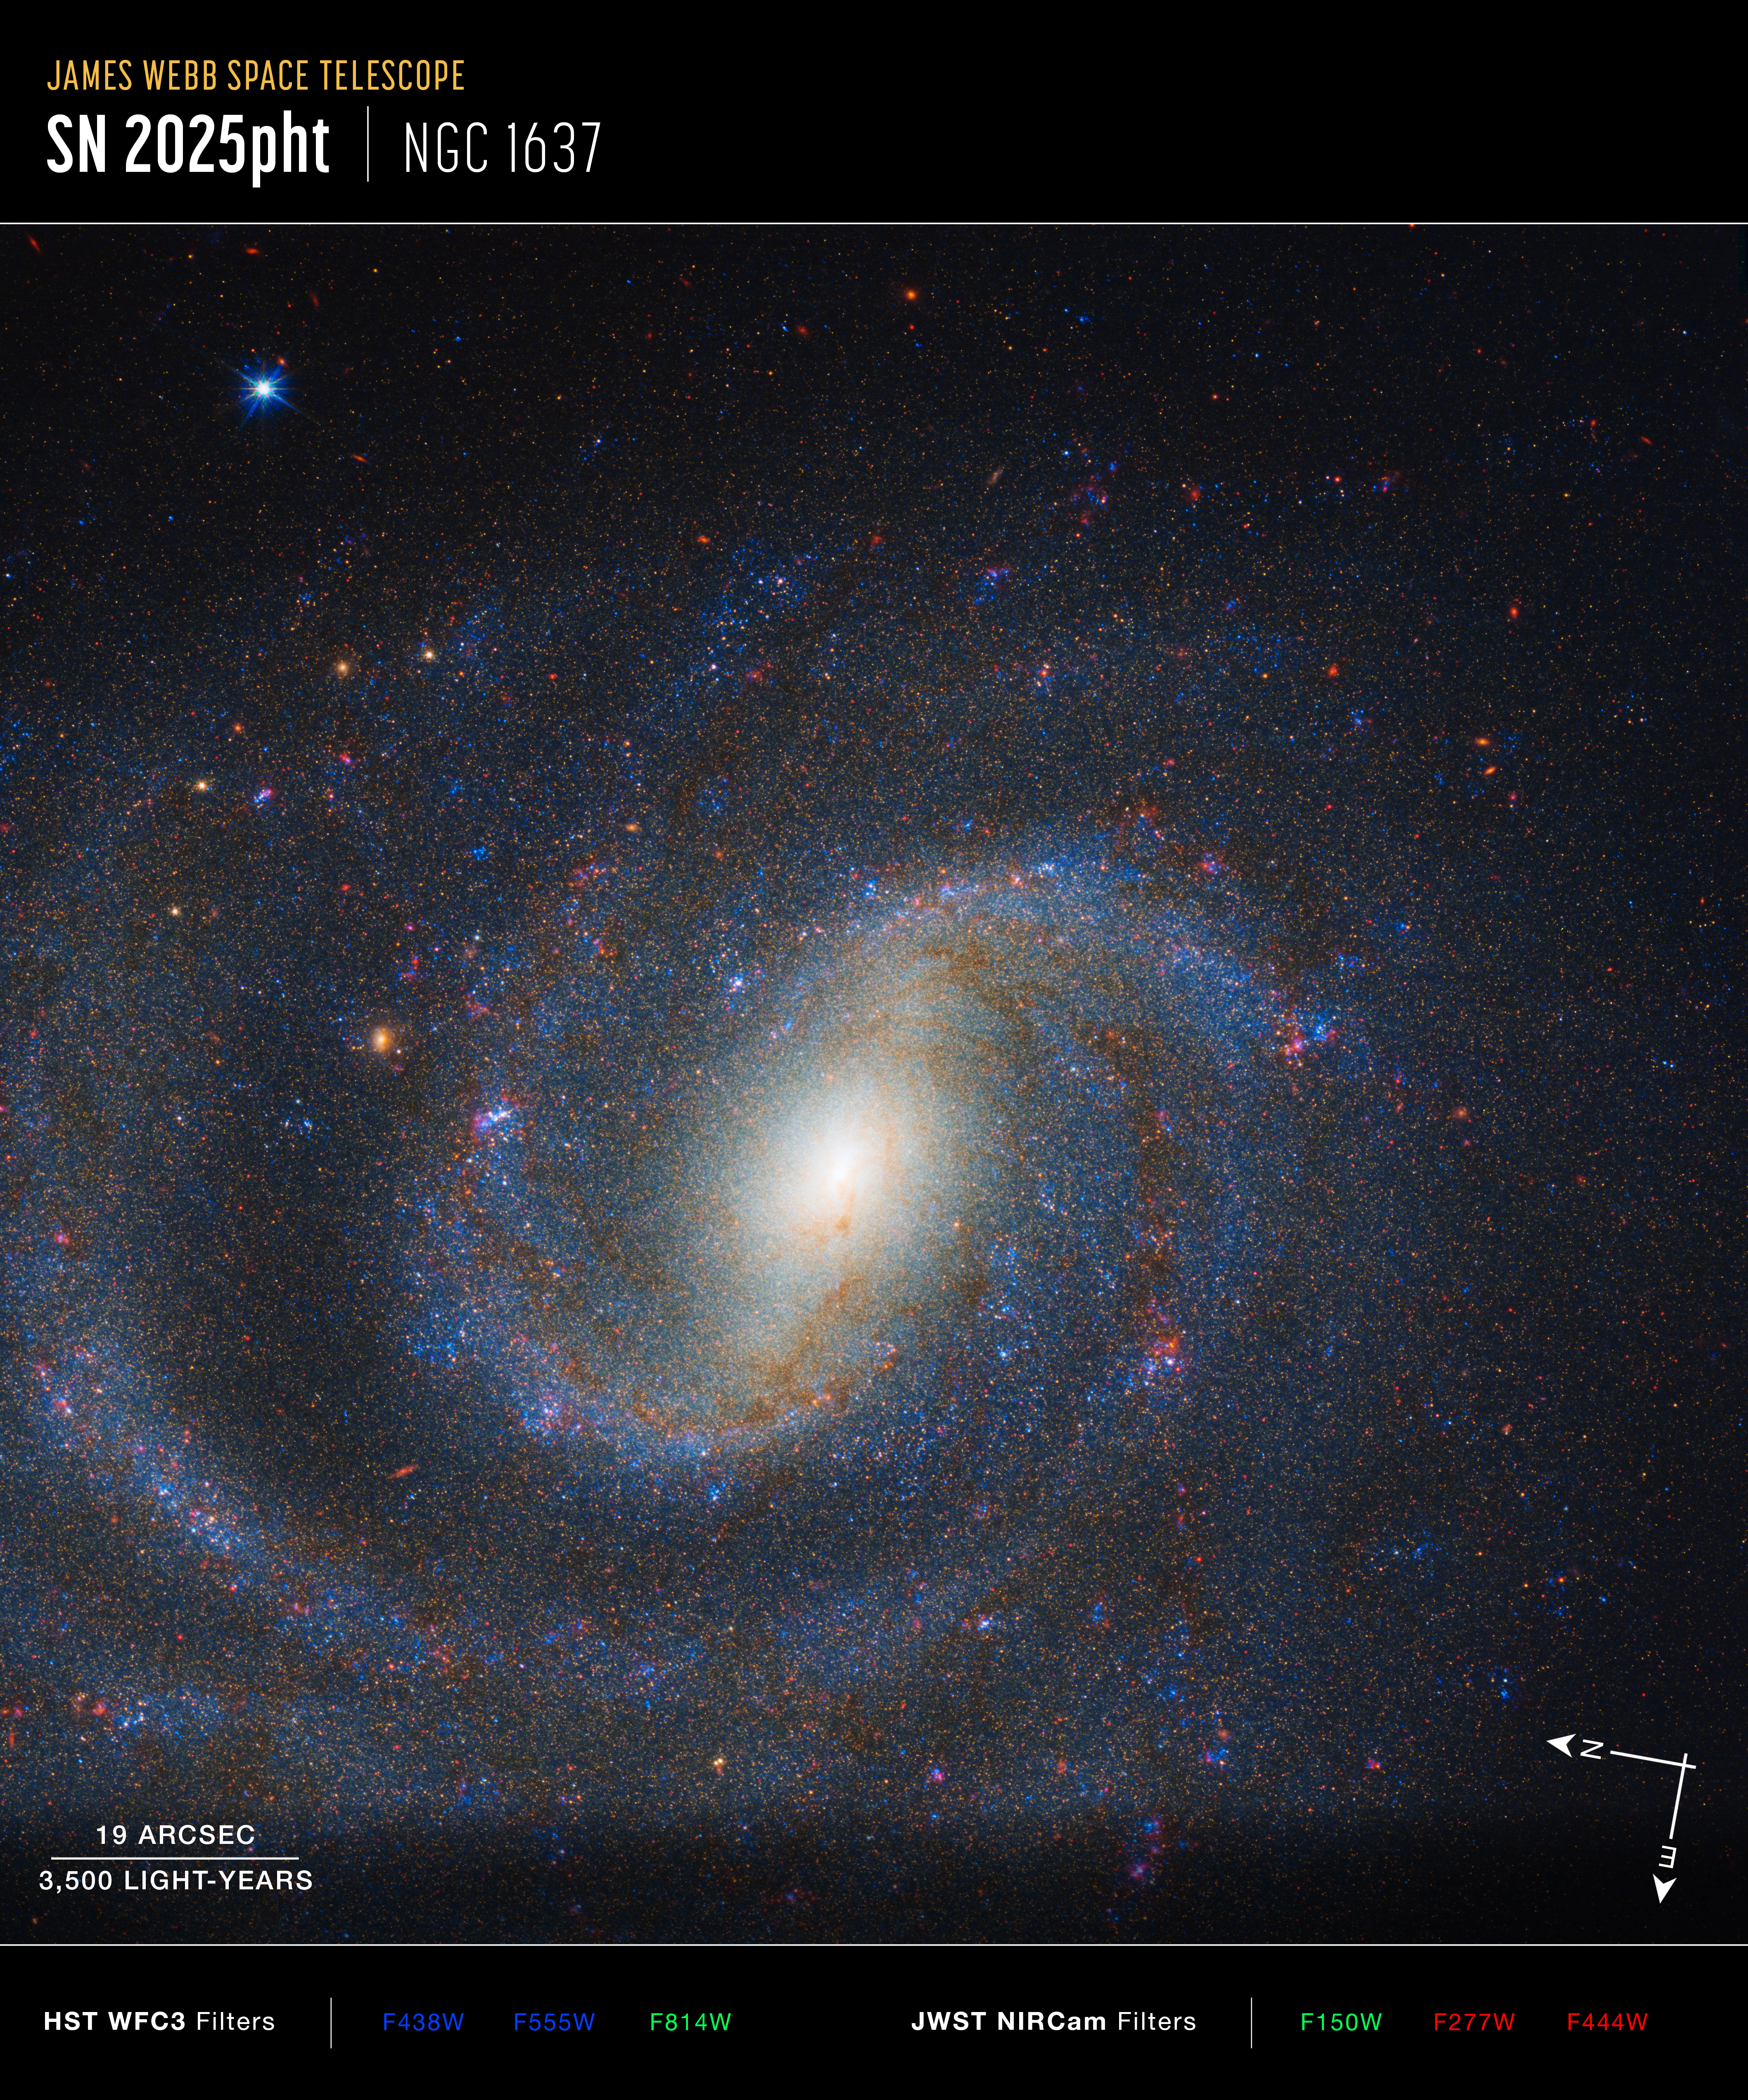

NGC 1637 (Hubble WFC3 and Webb NIRCam images, annotated)

Image of galaxy NGC 1637 captured by Hubble’s WFC3 and Webb’s NIRCam, with compass arrows, scale bar, and colour key for reference.

The north and east compass arrows show the orientation of the image on the sky. Note that the relationship between north and east on the sky (as seen from below) is flipped relative to direction arrows on a map of the ground (as seen from above).

The scale bar is labeled in light-years, which is the distance that light travels in one Earth-year. (It takes 3,500 years for light to travel a distance equal to the length of the bar.) One light-year is equal to about 5.88 trillion miles or 9.46 trillion kilometers.

This image shows visible and near-infrared wavelengths of light that have been translated into visible-light colours. The colour key shows which WFC3 and NIRCam filters were used when collecting the light. The colour of each filter name is the visible light colour used to represent the light that passes through that filter.

Credit: NASA, ESA, CSA, STScI, C. Kilpatrick (Northwestern), A. Suresh (Northwestern); Image Processing: J. DePasquale (STScI)